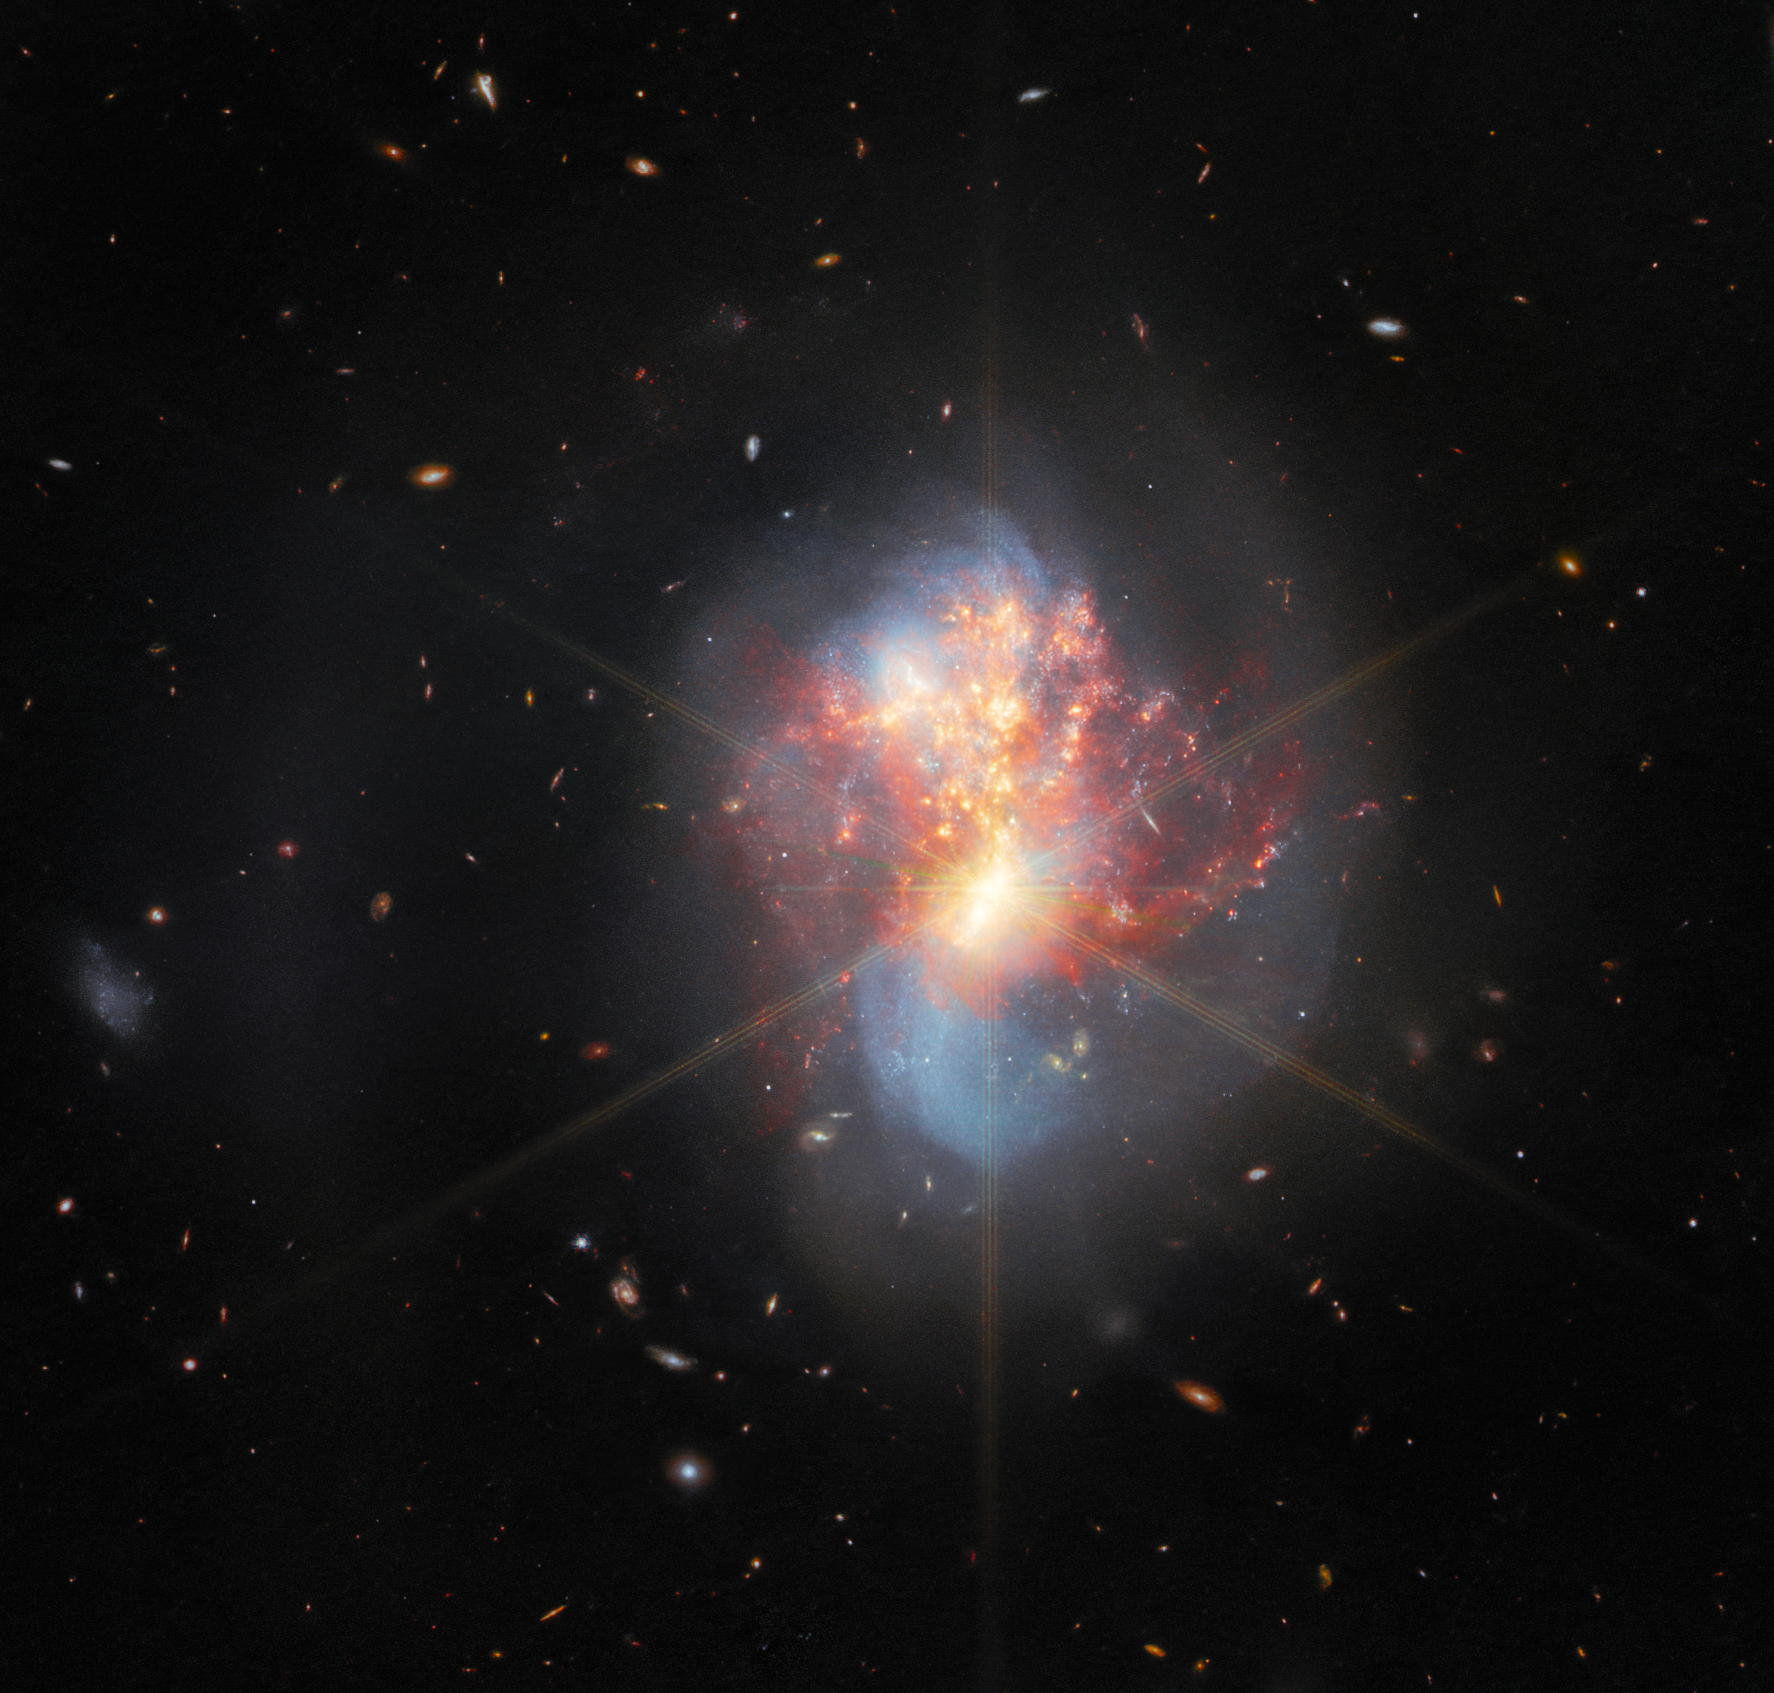

Webb Explores a Pair of Merging Galaxies

This image from the NASA/ESA/CSA James Webb Space Telescope depicts IC 1623, an entwined pair of interacting galaxies which lies around 270 million light-years from Earth in the constellation Cetus. The two galaxies in IC 1623 are plunging headlong into one another in a process known as a galaxy merger. Their collision has ignited a frenzied spate of star formation known as a starburst, creating new stars at a rate more than twenty times that of the Milky Way galaxy.

This interacting galaxy system is particularly bright at infrared wavelengths, making it a perfect proving ground for Webb’s ability to study luminous galaxies. A team of astronomers captured IC 1623 across the infrared portions of the electromagnetic spectrum using a trio of Webb’s cutting-edge scientific instruments: MIRI, NIRSpec, and NIRCam. In so doing, they provided an abundance of data that will allow the astronomical community at large to fully explore how Webb’s unprecedented capabilities will help to unravel the complex interactions in galactic ecosystems. These observations are also accompanied by data from other observatories, including the NASA/ESA Hubble Space Telescope, and will help set the stage for future observations of galactic systems with Webb.

The merger of these two galaxies has long been of interest to astronomers, and has previously been imaged by Hubble and by other space telescopes. The ongoing, extreme starburst causes intense infrared emission, and the merging galaxies may well be in the process of forming a supermassive black hole. A thick band of dust has blocked these valuable insights from the view of telescopes like Hubble. However, Webb’s infrared sensitivity and its impressive resolution at those wavelengths allows it to see past the dust and has resulted in the spectacular image above, a combination of MIRI and NIRCam imagery.

The luminous core of the galaxy merger turns out to be both very bright and highly compact, so much so that Webb’s diffraction spikes appear atop the galaxy in this image. The 8-pronged, snowflake-like diffraction spikes are created by the interaction of starlight with the physical structure of the telescope. The spiky quality of Webb’s observations is particularly noticeable in images containing bright stars, such as Webb’s first deep field image.

MIRI was contributed by ESA and NASA, with the instrument designed and built by a consortium of nationally funded European Institutes (The MIRI European Consortium) in partnership with JPL and the University of Arizona.

NIRSpec was built for the European Space Agency (ESA) by a consortium of European companies led by Airbus Defence and Space (ADS) with NASA’s Goddard Space Flight Center providing its detector and micro-shutter subsystems.

Results based on this observation of IC 1623 have been published in the Astrophysical Journal.

Credit: ESA/Webb, NASA & CSA, L. Armus & A. Evans Acknowledgement: R. Colombari